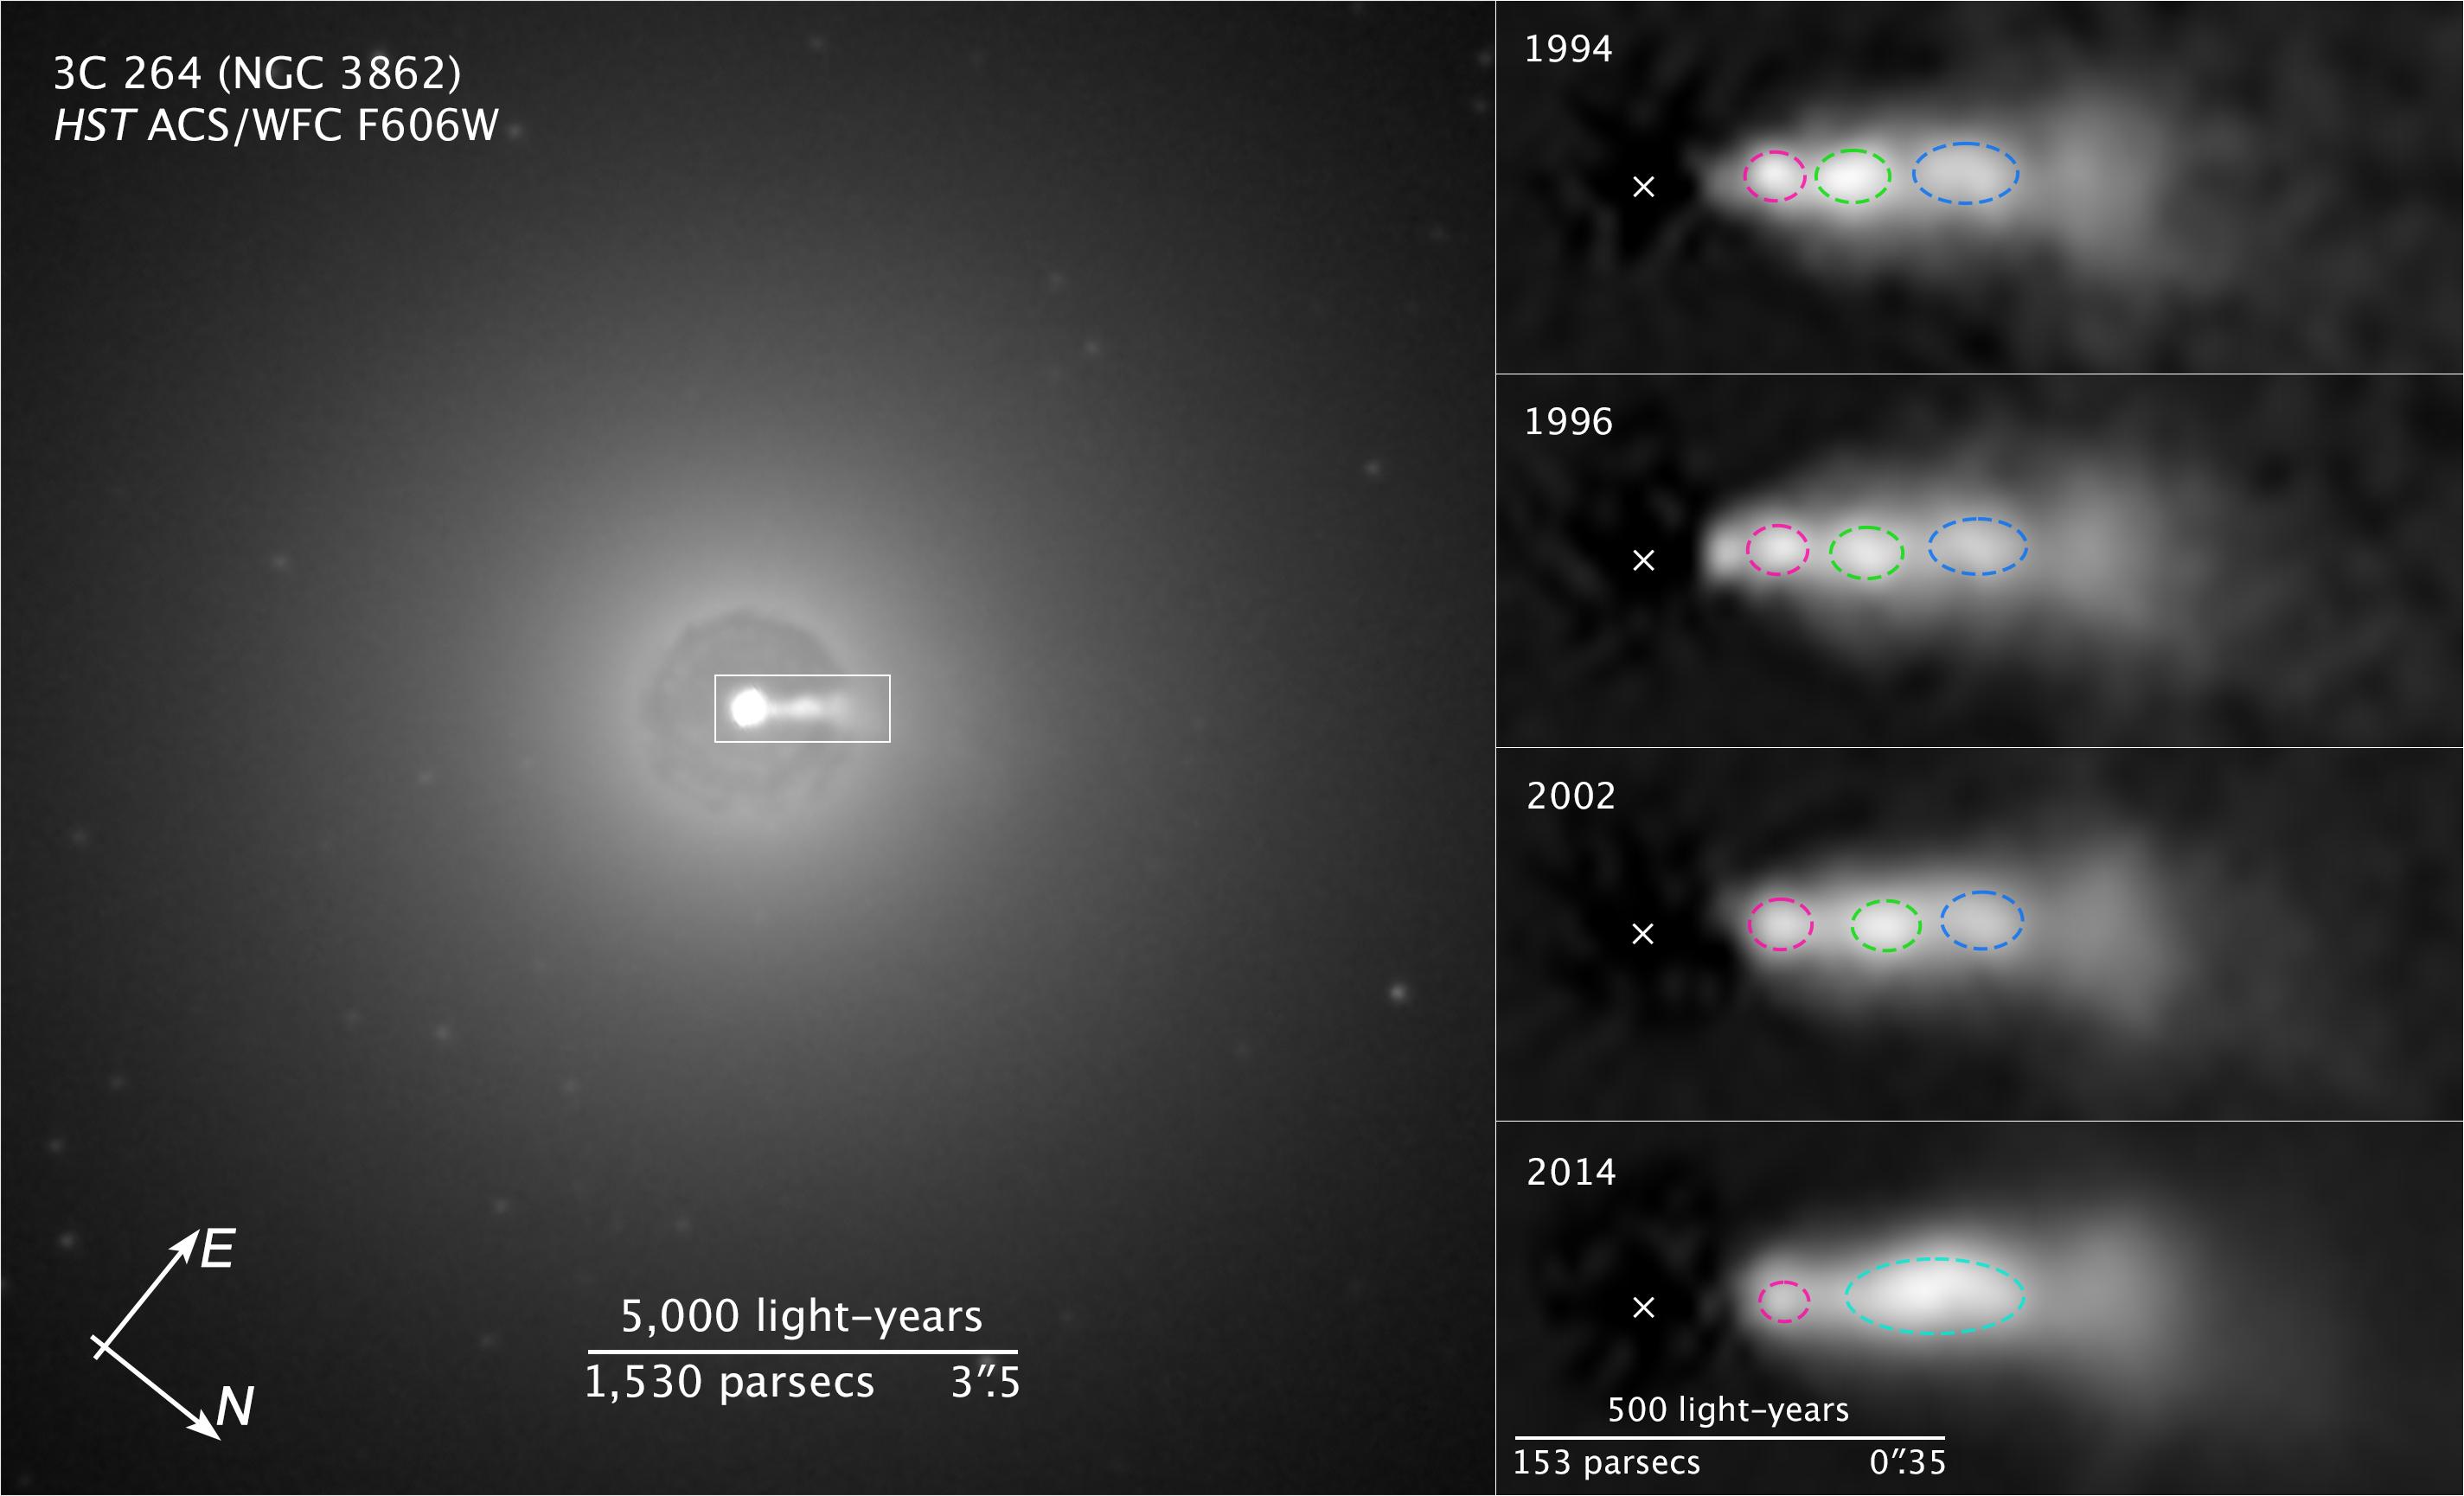

Compass and Scale Image of 3C 264

[Left] In this NASA Hubble Space Telescope image of the central region of the galaxy NGC 3862, an extragalactic jet of material moving at nearly the speed of light can be seen at the three o'clock position. The jet of ejected plasma is powered by energy from a supermassive black hole at the center of the elliptical galaxy, which is located 260 million light-years away in the constellation of Leo.

[Right] A sequence of Hubble images of knots (outlined in red, green, and blue) shows them moving along the jet over a 20-year span of observing. Astronomers were surprised to discover that the central knot (green) caught up with and merged with the knot in front of it (blue). The new analysis suggests that shocks produced by collisions within the jet further accelerate particles that are confined to a narrowly focused beam of radiation. The "X" marks the location of the black hole.

Credit: NASA, ESA, and Z. Levay (STScI) Acknowledgment: E. Meyer (STScI)